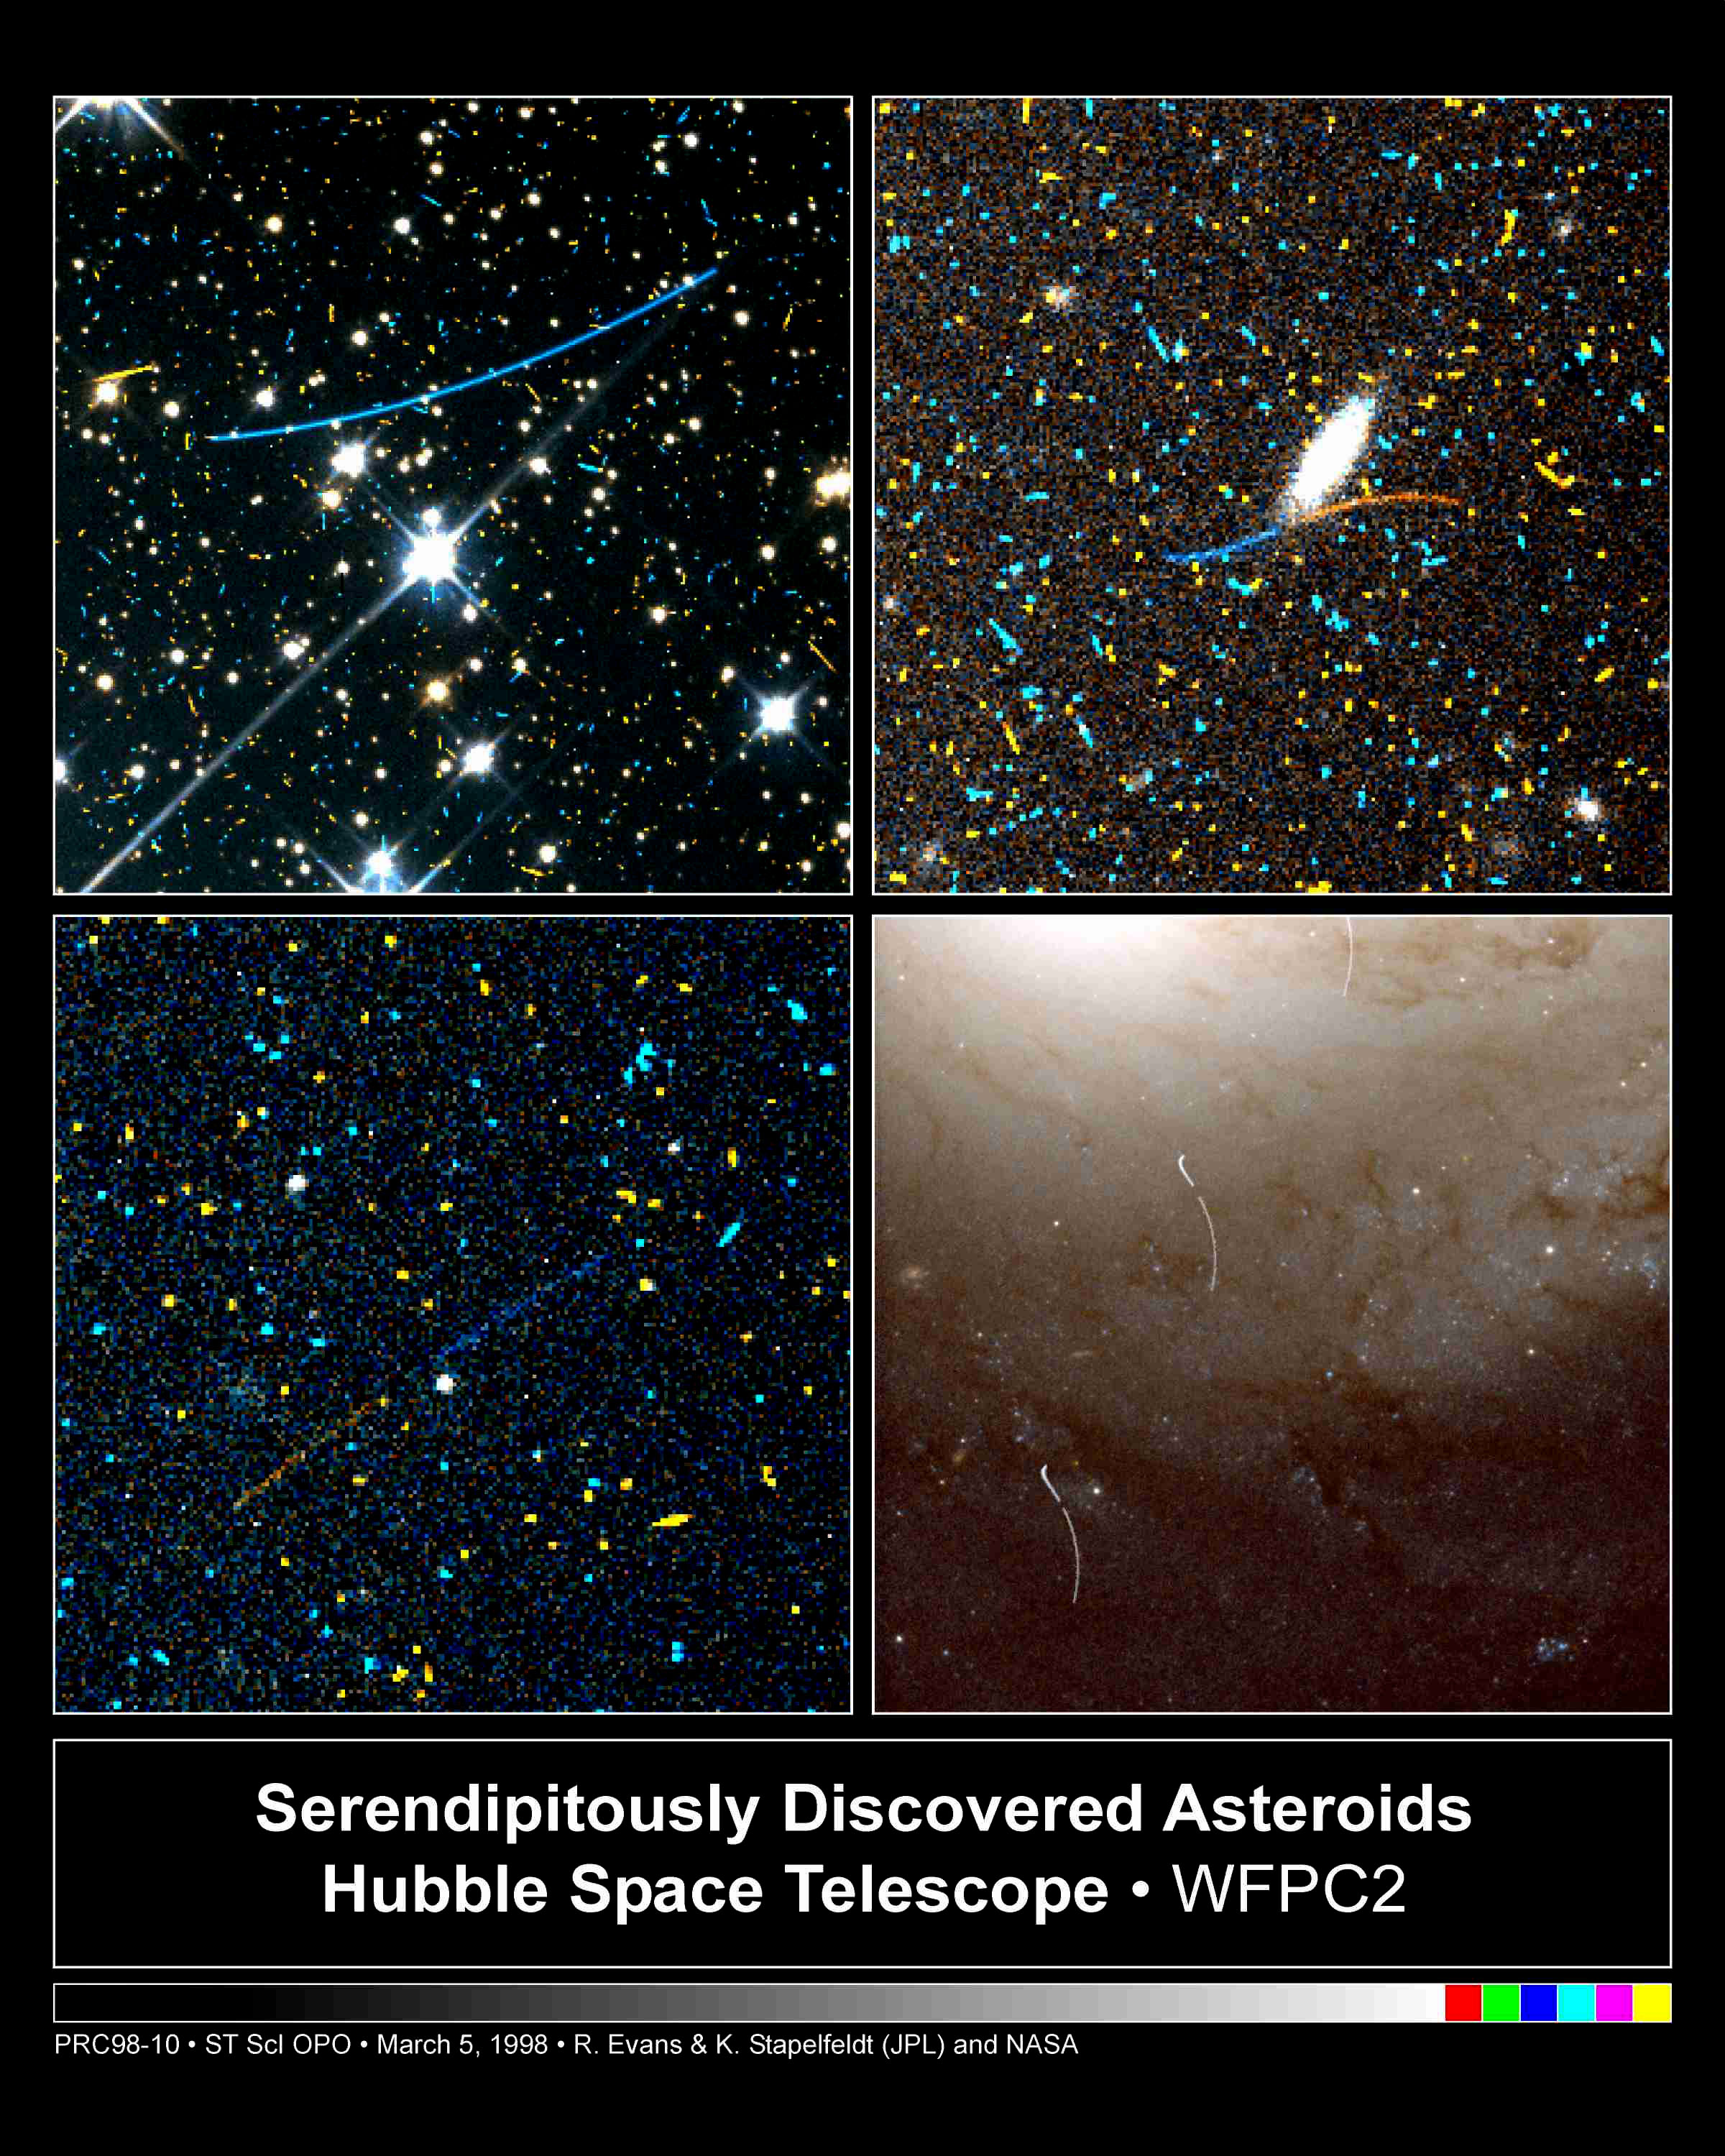

Serendipitously Discovered Asteroids

Astronomers Karl Stapelfeldt and Robin Evans have tracked down about 100 small asteroids by hunting through more than 28, 000 archival images taken by the Hubble Space Telescope's Wide Field and Planetary Camera 2. Here is a sample of what they have found: four archival images that show the curved trails left by asteroids.

Credit: R. Evans and K. Stapelfeldt (Jet Propulsion Laboratory) and NASA/ESA